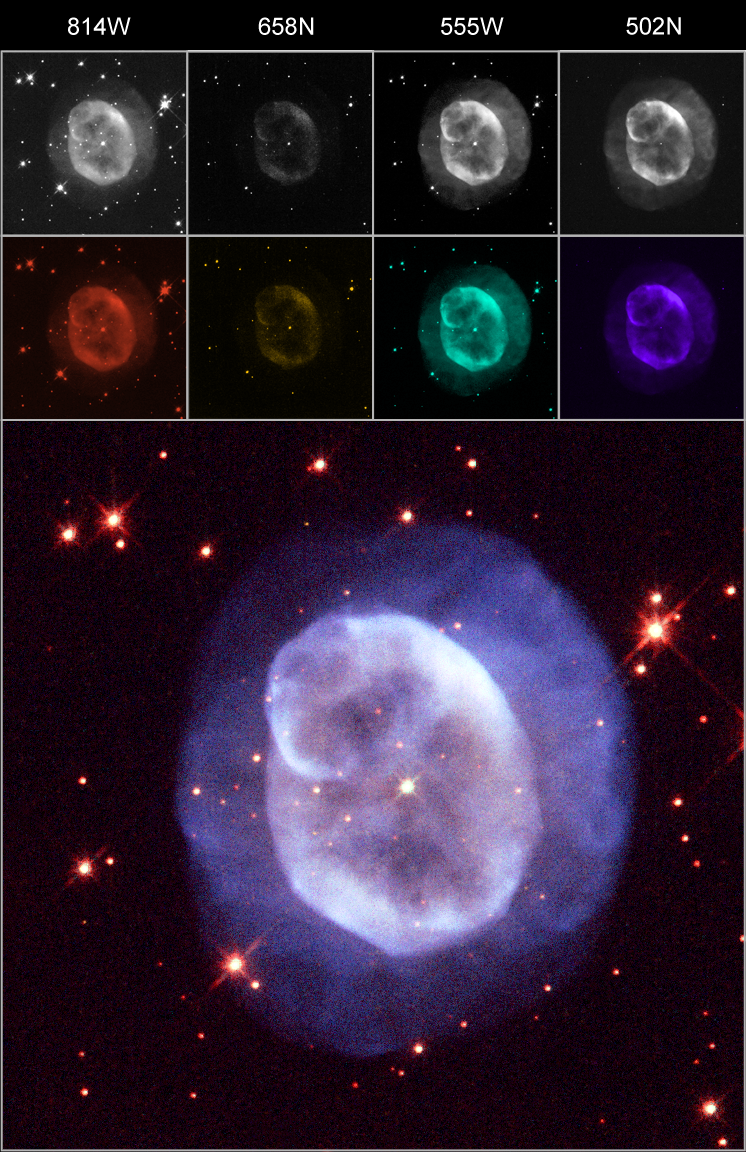

An example of an image created with ESA/ESO/NASA Photoshop FITS Liberator

This previously unreleased colour image of the planetary nebula NGC 5979 was combined from raw FITS files with the ESA/ESO/NASA Photoshop FITS Liberator. In the top row the raw greyscale images are seen. Four individual exposures were combined to form this colour image and the colour filters for the individual exposures are indicated. The number refers to the colour, or wavelength, of light that the filter allows through. This is measured in nanometres (a millionth of a millimetre). The N's and W's in the filter name refer to whether the filter is a narrow-band (N) or a wide-band filter (W). The second row shows the individual exposures after a colorising layer has been applied in Photoshop.

Credit: ESA, ESO and NASA